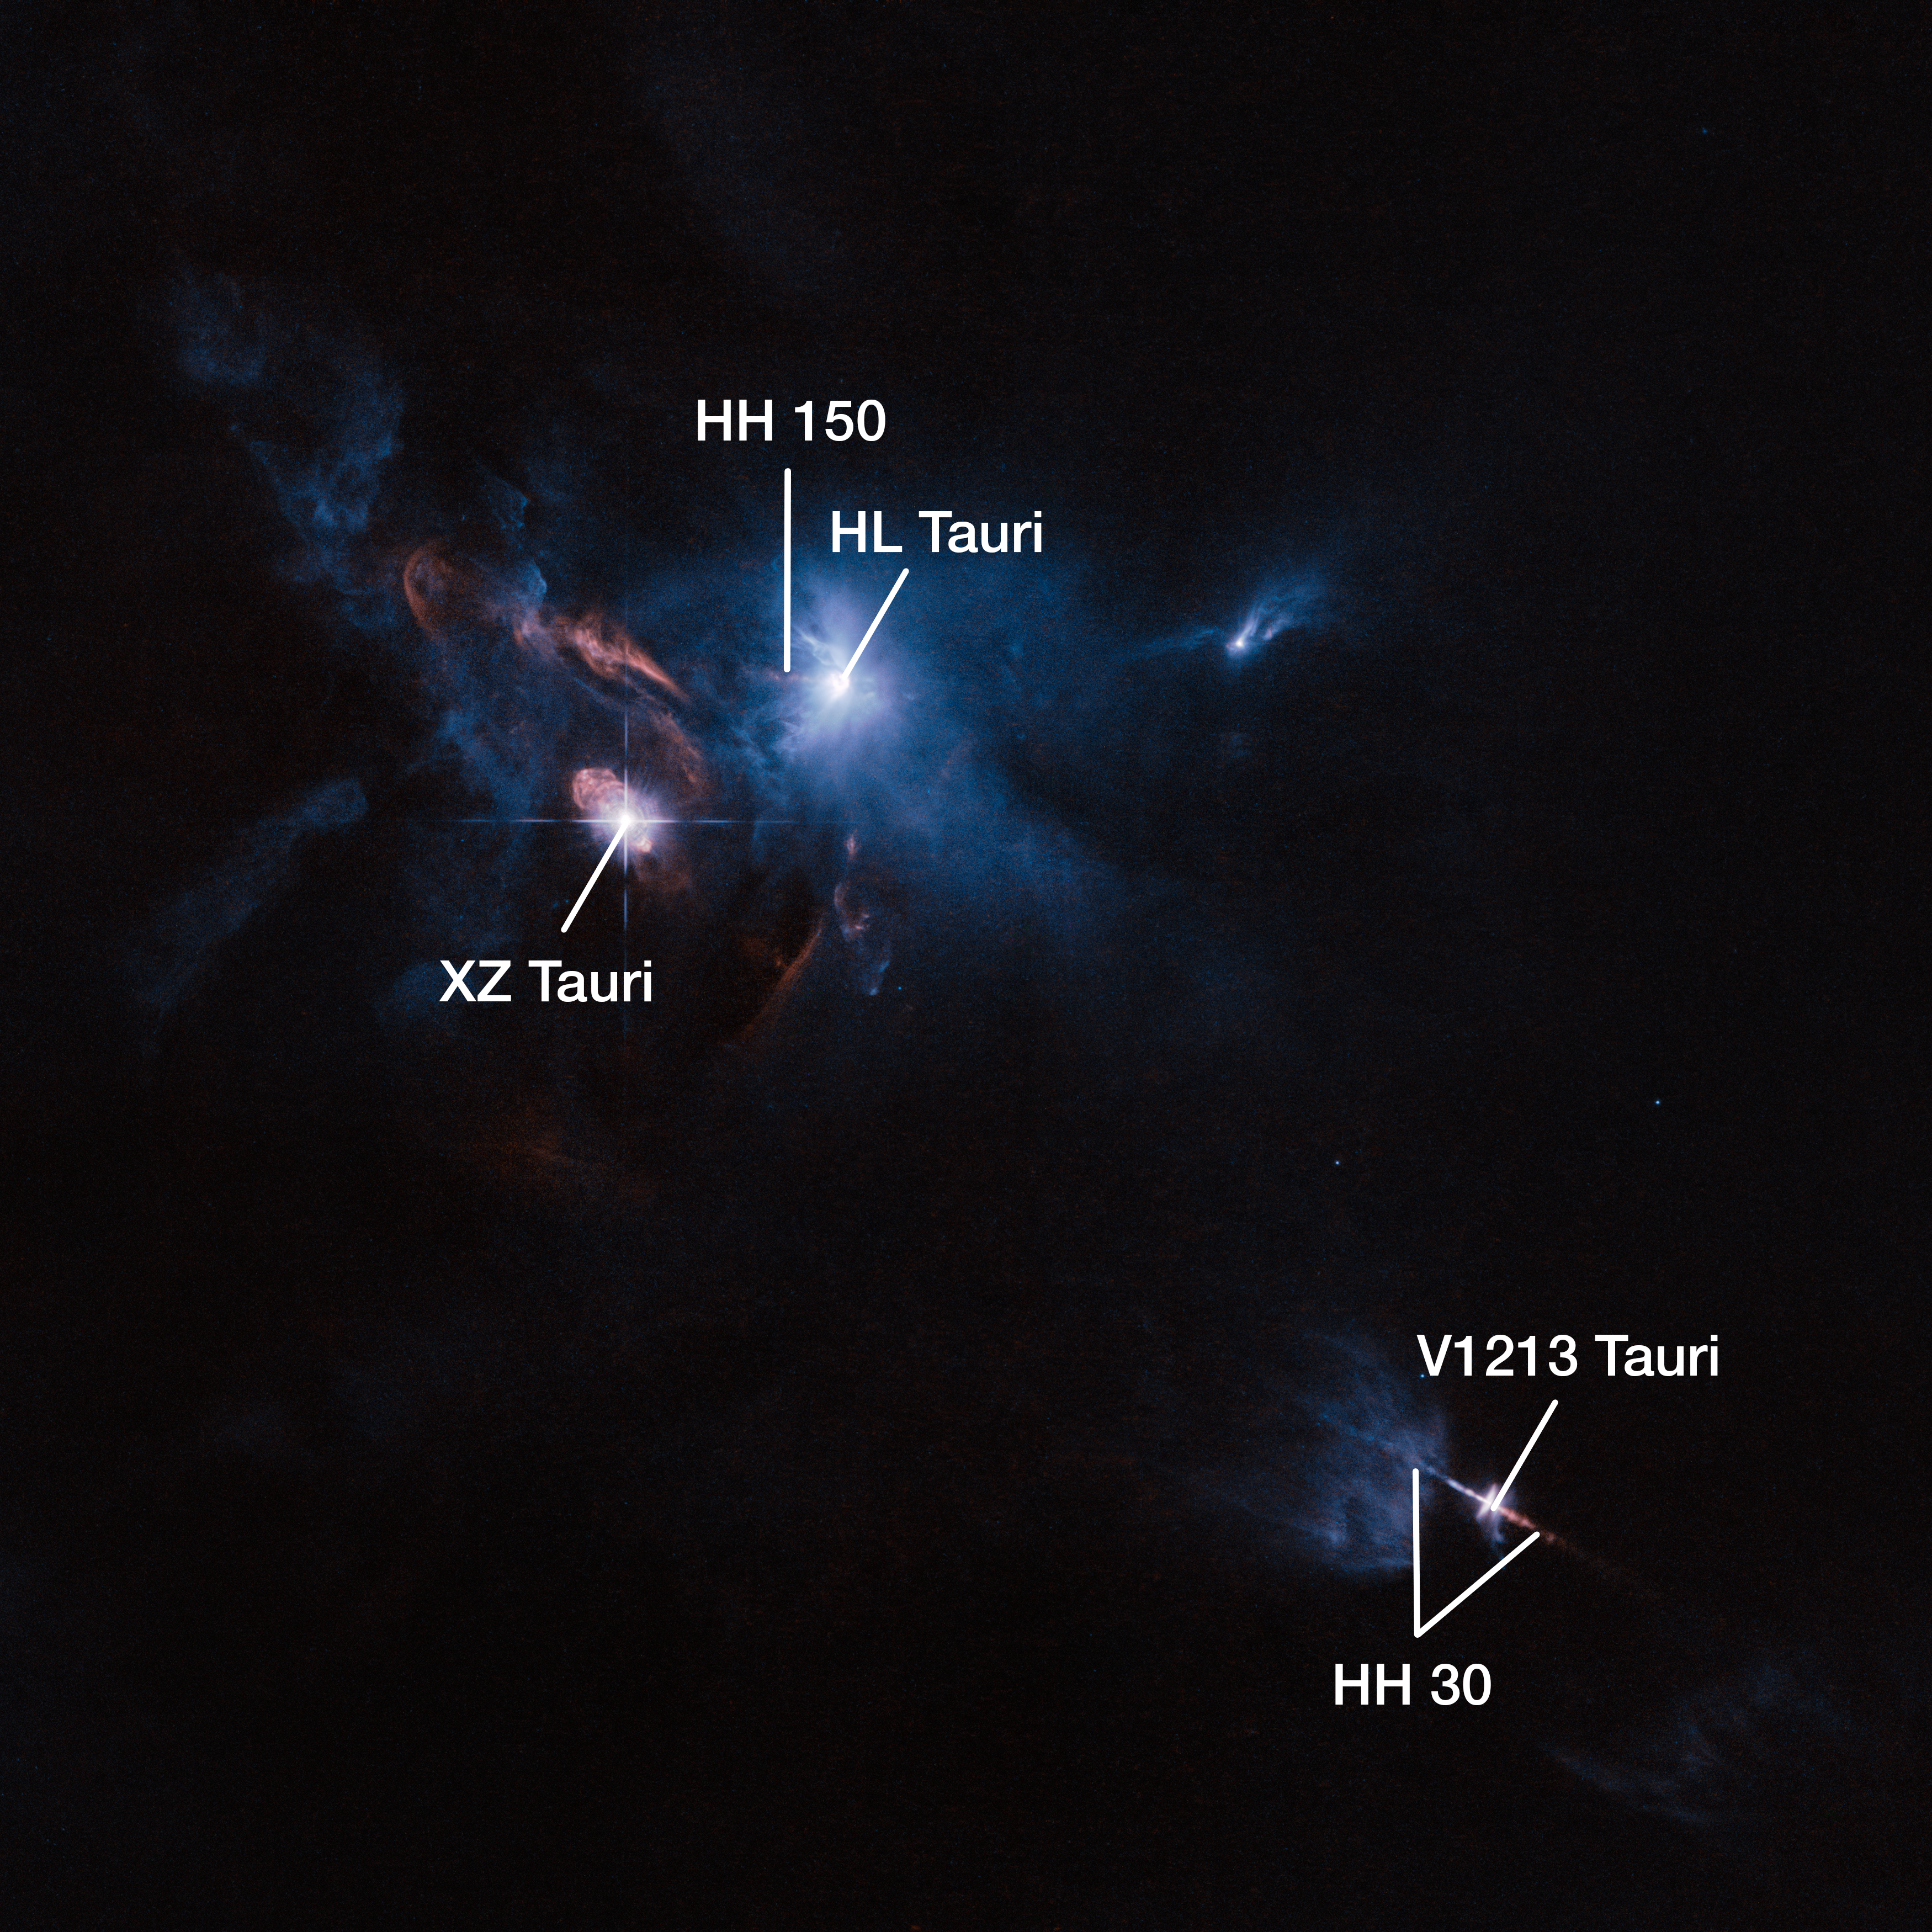

Jets, bubbles and bursts of light in Taurus — annotated

The NASA/ESA Hubble Space Telescope has snapped a striking view of a multiple star system called XZ Tauri, its neighbour HL Tauri and several nearby young stellar objects. XZ Tauri is blowing a hot bubble of gas into the surrounding space, which is filled with bright and beautiful clumps that are emitting strong winds and jets. These objects illuminate the region, creating a truly dramatic scene.

In this image XZ Tauri, HL Tauri and V1213 Tauri — as well as the Herbig-Haro objects HH 150 and HH 30 associated with the latter two — have been highlighted.

Credit: ESA/Hubble and NASA Acknowledgement: Judy Schmidt